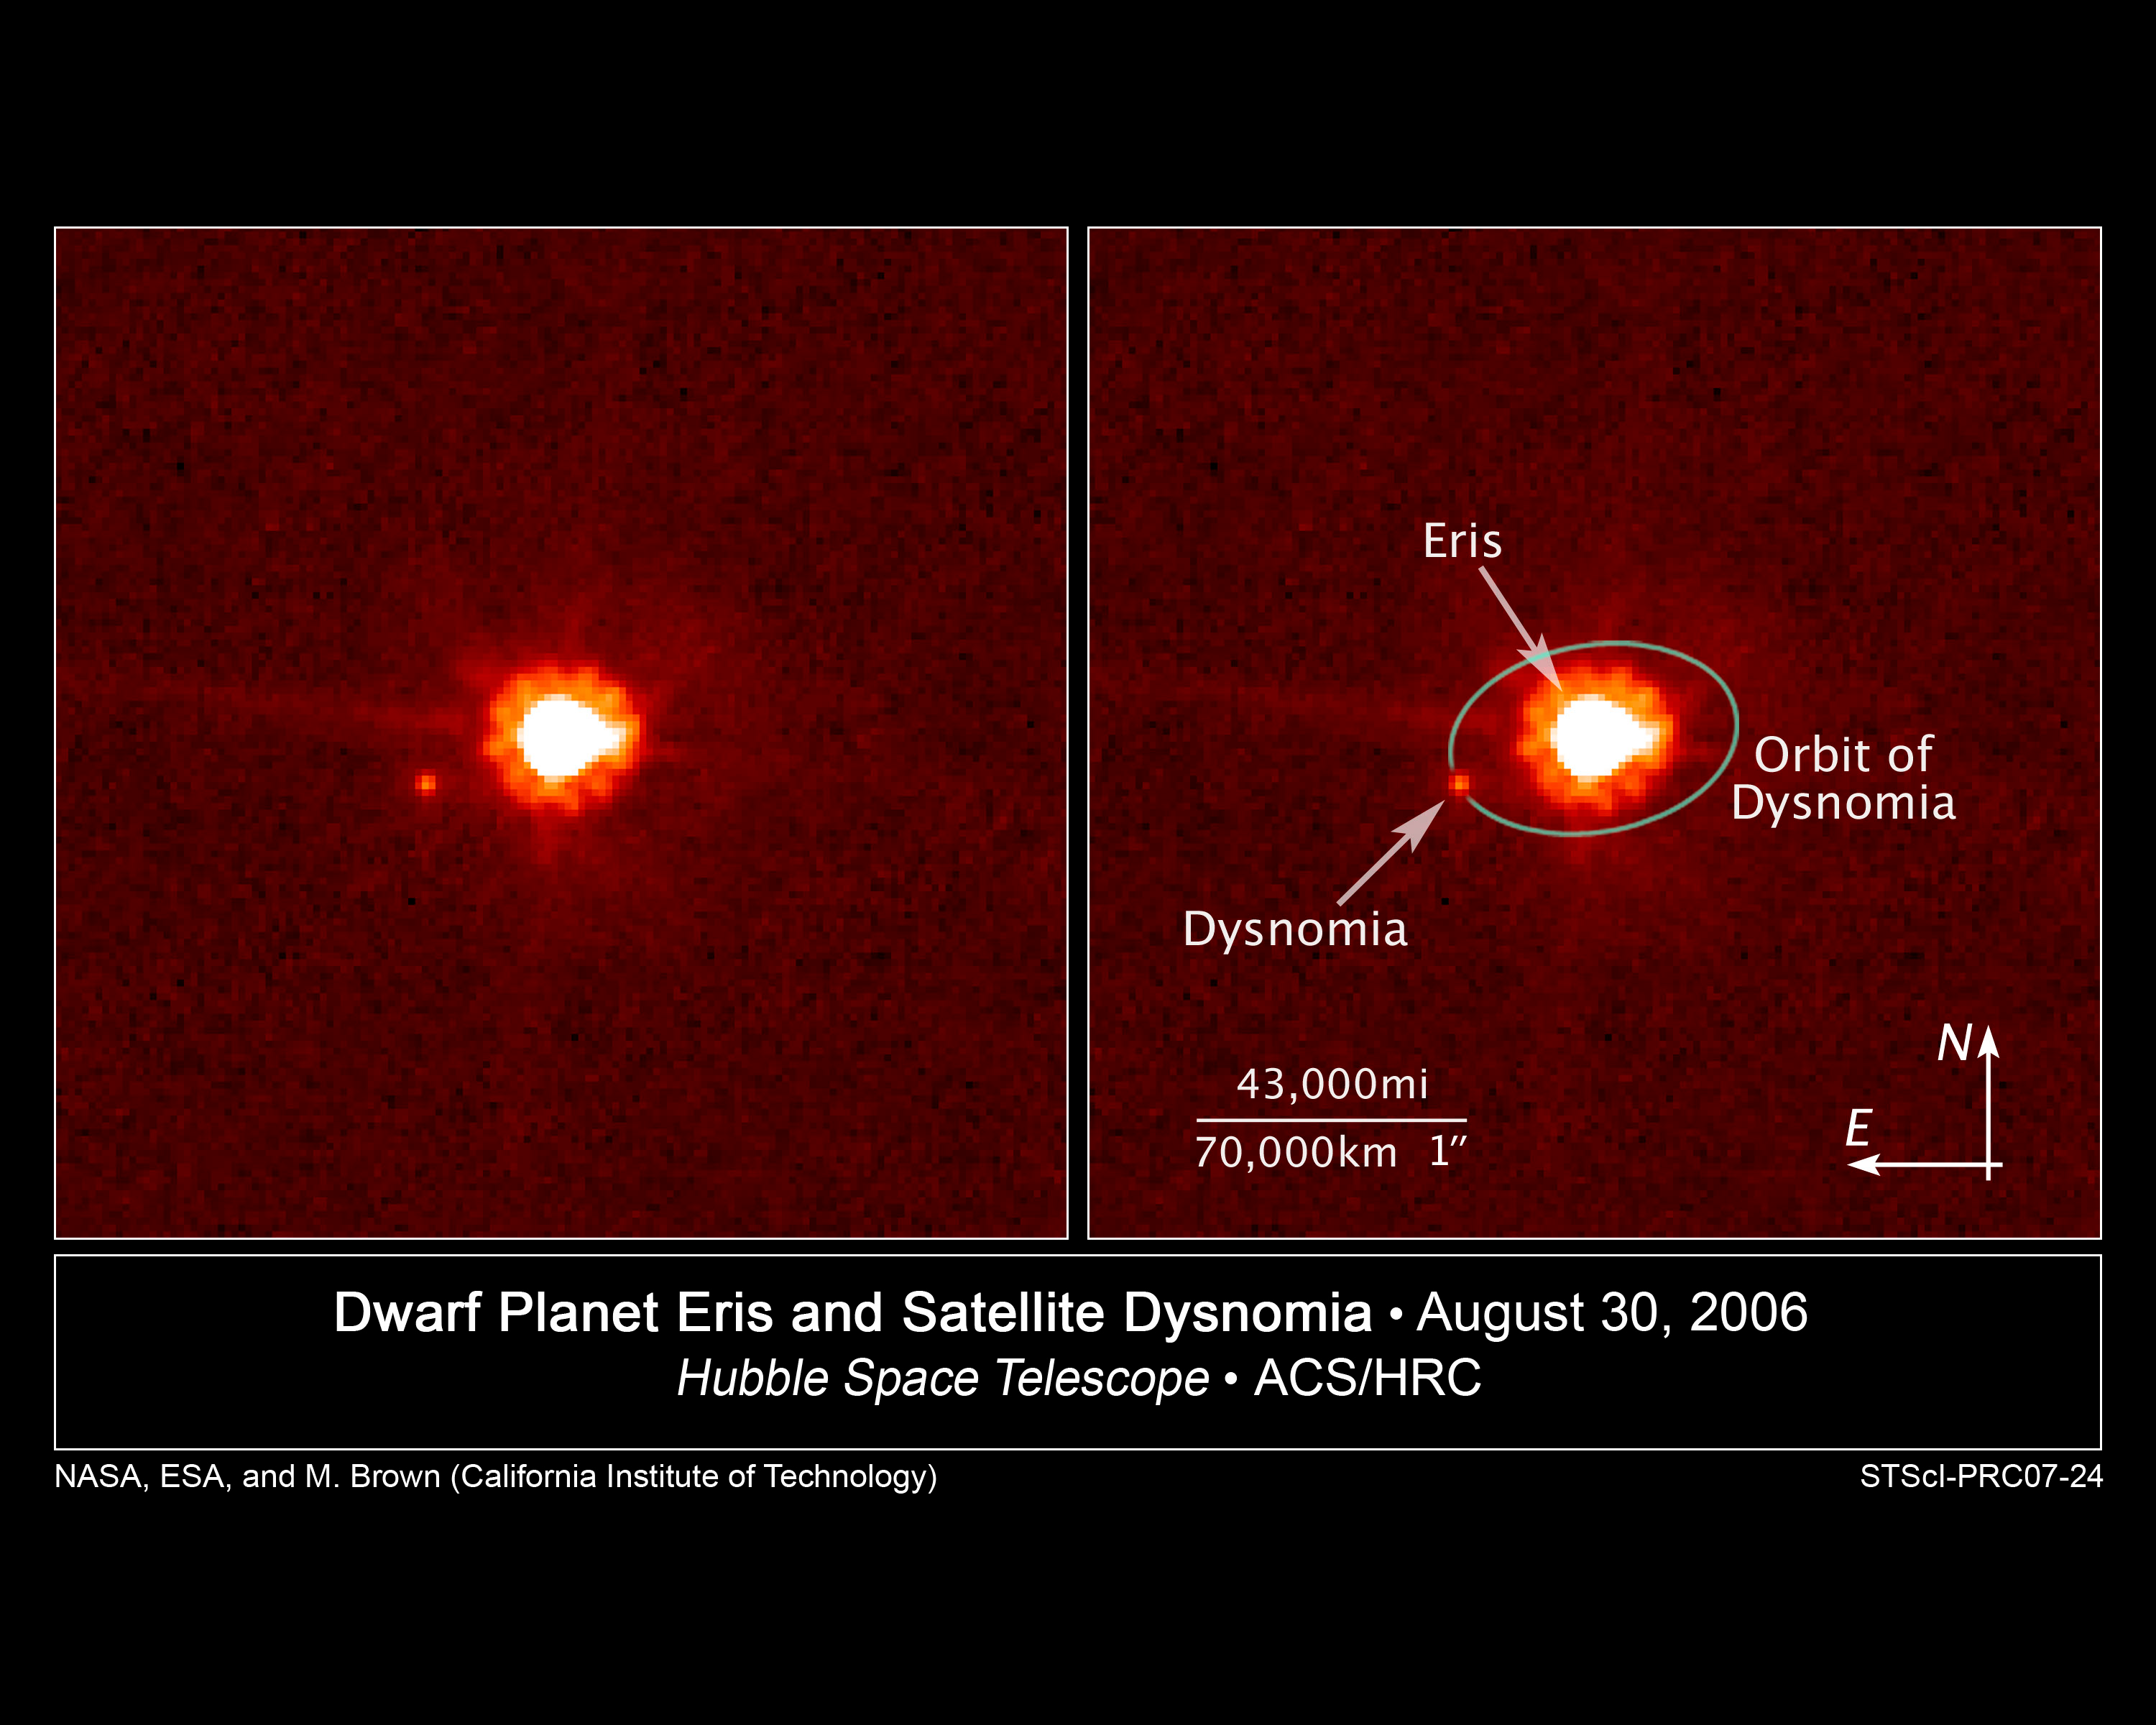

Hubble view of Eris and Dysnomia

[Left] - This is an image of the dwarf planet Eris (centre) and its satellite Dysnomia (at 9 o'clock position) taken with NASA/ESA's Hubble Space Telescope on Aug. 30, 2006. Hubble observations were obtained on Dec. 3, 2005 and Aug. 30, 2006 using the Advanced Camera for Surveys. The Hubble images were combined with images from the Keck telescopes taken on Aug. 20, 21, 30, and 31 to measure the satellite's orbit and calculate a mass for Eris, which is the largest dwarf planet in the Solar System.

[Right] - Labeled version of the above mentioned image of dwarf planet Eris and its satellite Dysnomia taken with NASA/ESA's Hubble Space Telescope on Aug. 30, 2006. Dysnomia's projected orbit around Eris is superimposed on the image.

Credit: NASA, ESA, and M. Brown (California Institute of Technology)